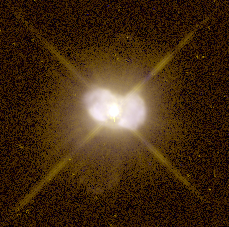

IC 4997

This image is a part of the Hubble Gallery of Planetary Nebulae.

Credit: Howard Bond (ST ScI) and NASA/ESA